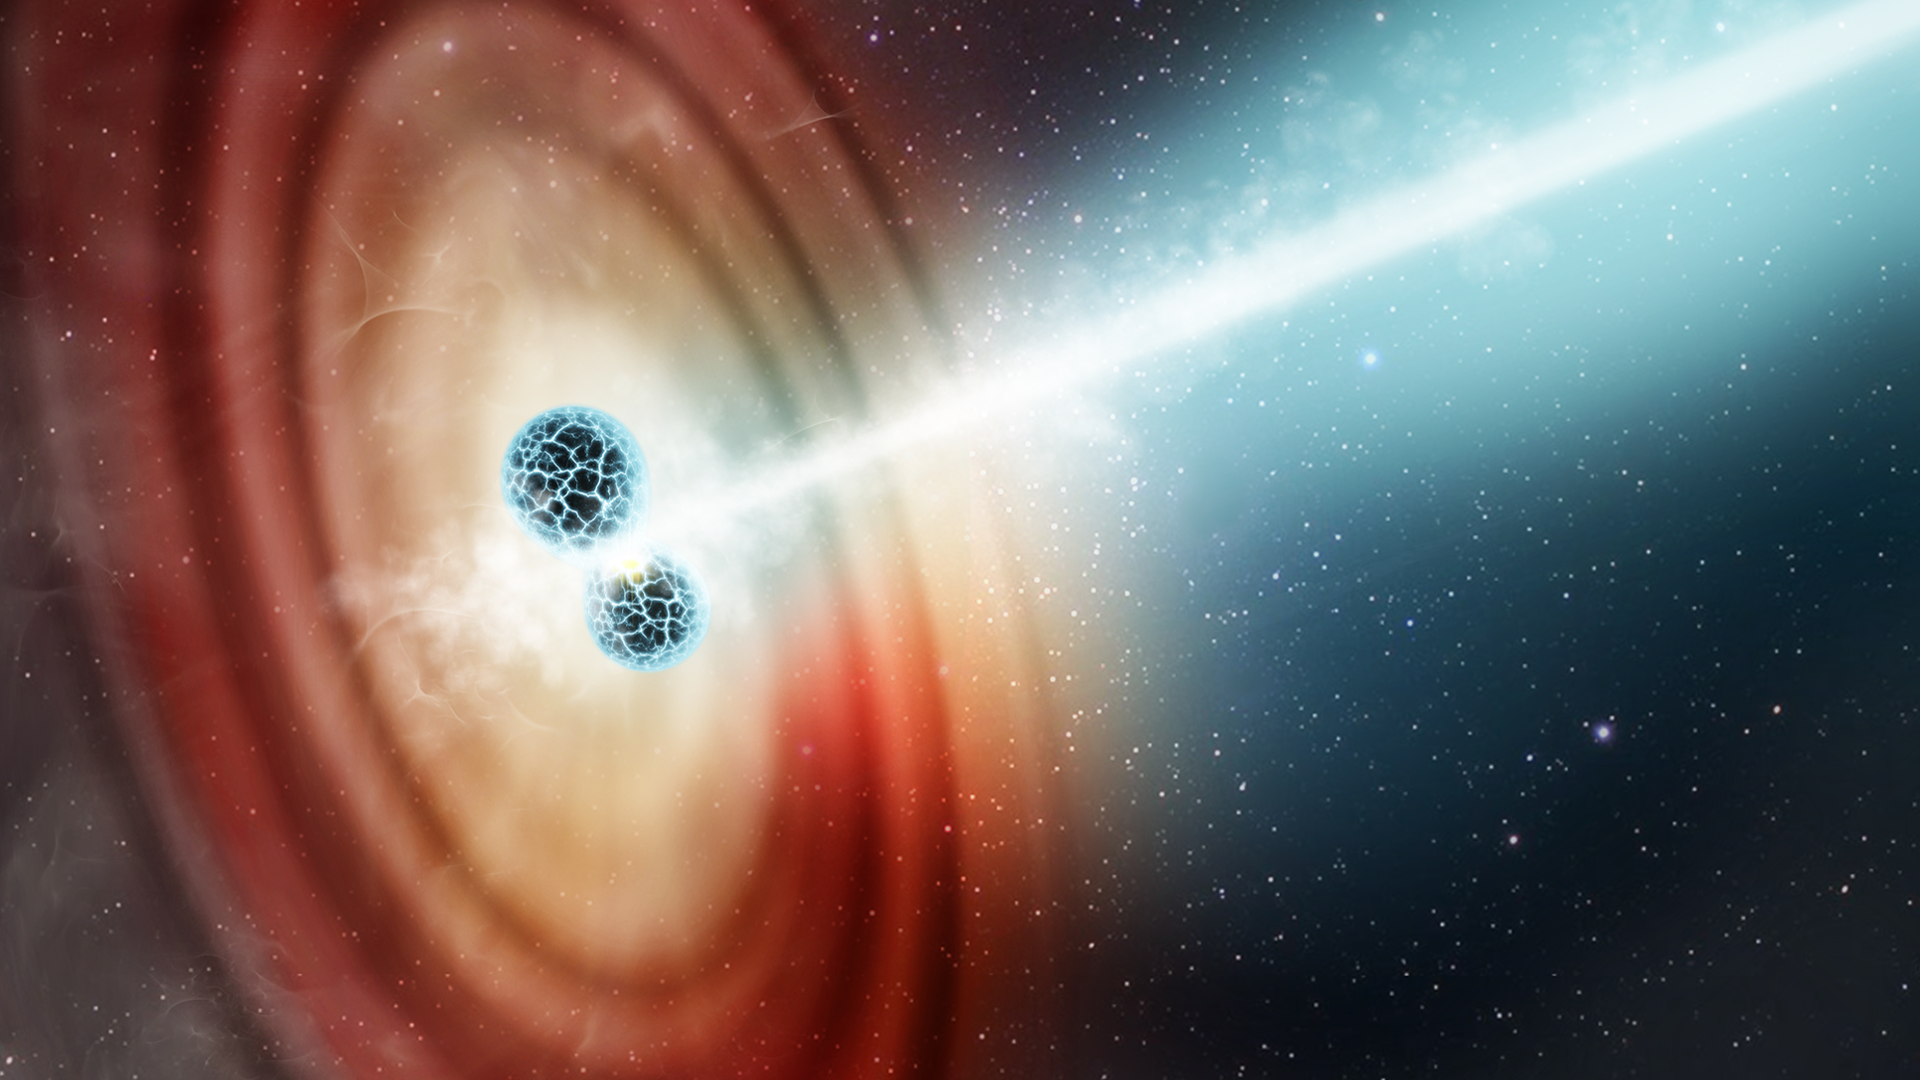

Hubble Spots Ultra-Speedy Jet Blasting From Star Crash

This is an artist's impression of two neutron stars colliding. The smashup between two dense stellar remnants unleashes the energy of 1,000 standard stellar nova explosions. In the aftermath of the collision a blowtorch jet of radiation is ejected at nearly the speed of light. The jet is directed along a narrow beam confined by powerful magnetic fields. The roaring jet ploughed into and swept up material in the surrounding interstellar medium.

The explosive event, named GW170817, was observed in August 2017. The blast released the energy comparable to that of a supernova explosion. It was the first combined detection of gravitational waves and gamma radiation from a neutron star merger.

In the aftermath of the smashup a blowtorch jet of radiation was ejected at nearly the speed of light, slamming into material surrounding the obliterated pair. The NASA/ESA Hubble Space Telescope observed the explosion just two days after the collision. Astronomers used Hubble to measure the motion of a blob of material the jet slammed into. As the jet rocketed away from the site of the explosion, the blob moved outward like a leaf caught on a stream of water from a garden hose. The incredible precision, gleaned from Hubble and radio telescopes, was needed to measure the blob's trajectory. This was a major watershed in the ongoing investigation of neutron star collisions that keep ringing throughout the universe.

Credit: STScI, L. Wheatley